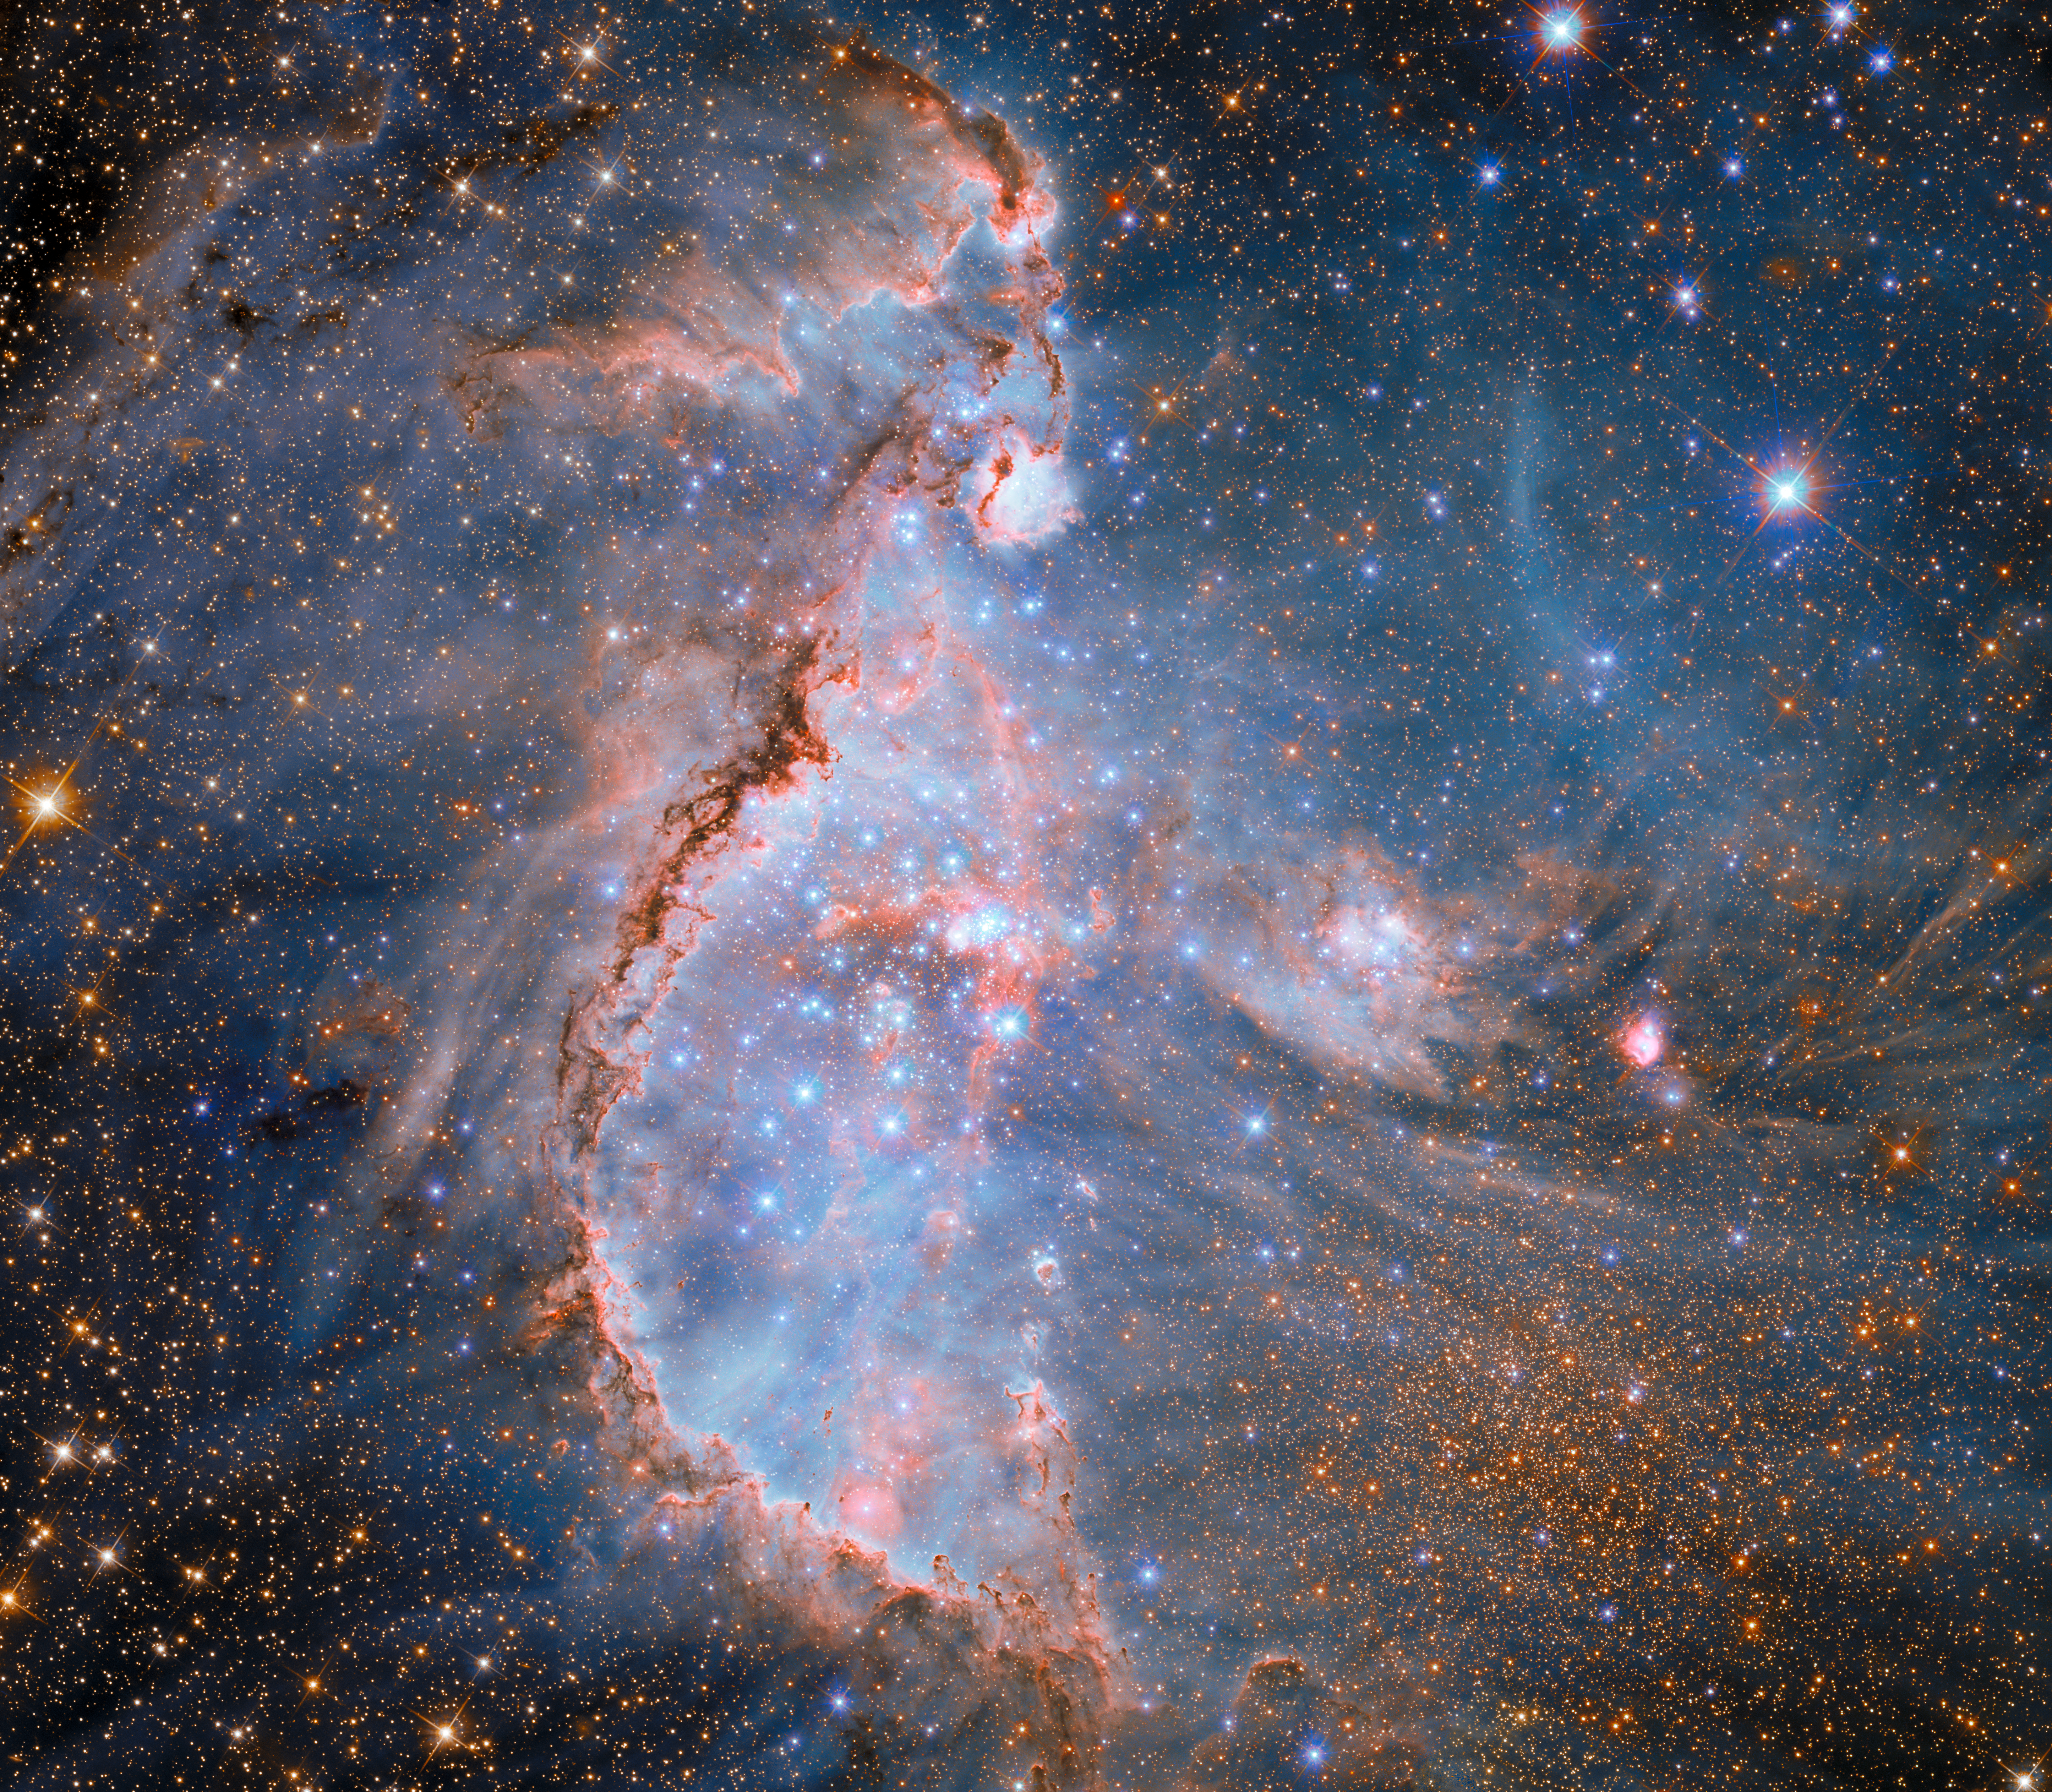

Stellar sculptors in NGC 346

This new image showcases NGC 346, a dazzling young star cluster in the Small Magellanic Cloud. The Small Magellanic Cloud is a satellite galaxy of the Milky Way, located 200 000 light-years away in the constellation Tucana. The Small Magellanic Cloud is less rich in elements heavier than helium — what astronomers call metals — than the Milky Way. This makes conditions in the galaxy similar to what existed in the early universe.

Although several images of NGC 346 have been released previously, this view includes new data and is the first to combine Hubble observations made at infrared, optical, and ultraviolet wavelengths into an intricately detailed view of this vibrant star-forming factory.

NGC 346 is home to more than 2500 newborn stars. The cluster’s most massive stars, which are many times more massive than our Sun, blaze with an intense blue light in this image. The glowing pink nebula and snakelike dark clouds are the remnant of the birthsite of the stars in the cluster.

The inhabitants of this cluster are stellar sculptors, carving out a bubble from the nebula. NGC 346’s hot, massive stars produce intense radiation and fierce stellar winds that pummel the billowing gas of their birthplace and begin to disperse the surrounding nebula.

The nebula, named N66, is the brightest example of an H II (pronounced ‘H-two’) region in the Small Magellanic Cloud. H II regions are set aglow by ultraviolet light from hot young stars like those in NGC 346. The presence of the brilliant nebula indicates the young age of the star cluster, as an H II region shines only as long as the stars that power it — a mere few million years for the massive stars pictured here.

Credit: ESA/Hubble & NASA, A. Nota, P. Massey, E. Sabbi, C. Murray, M. Zamani (ESA/Hubble)